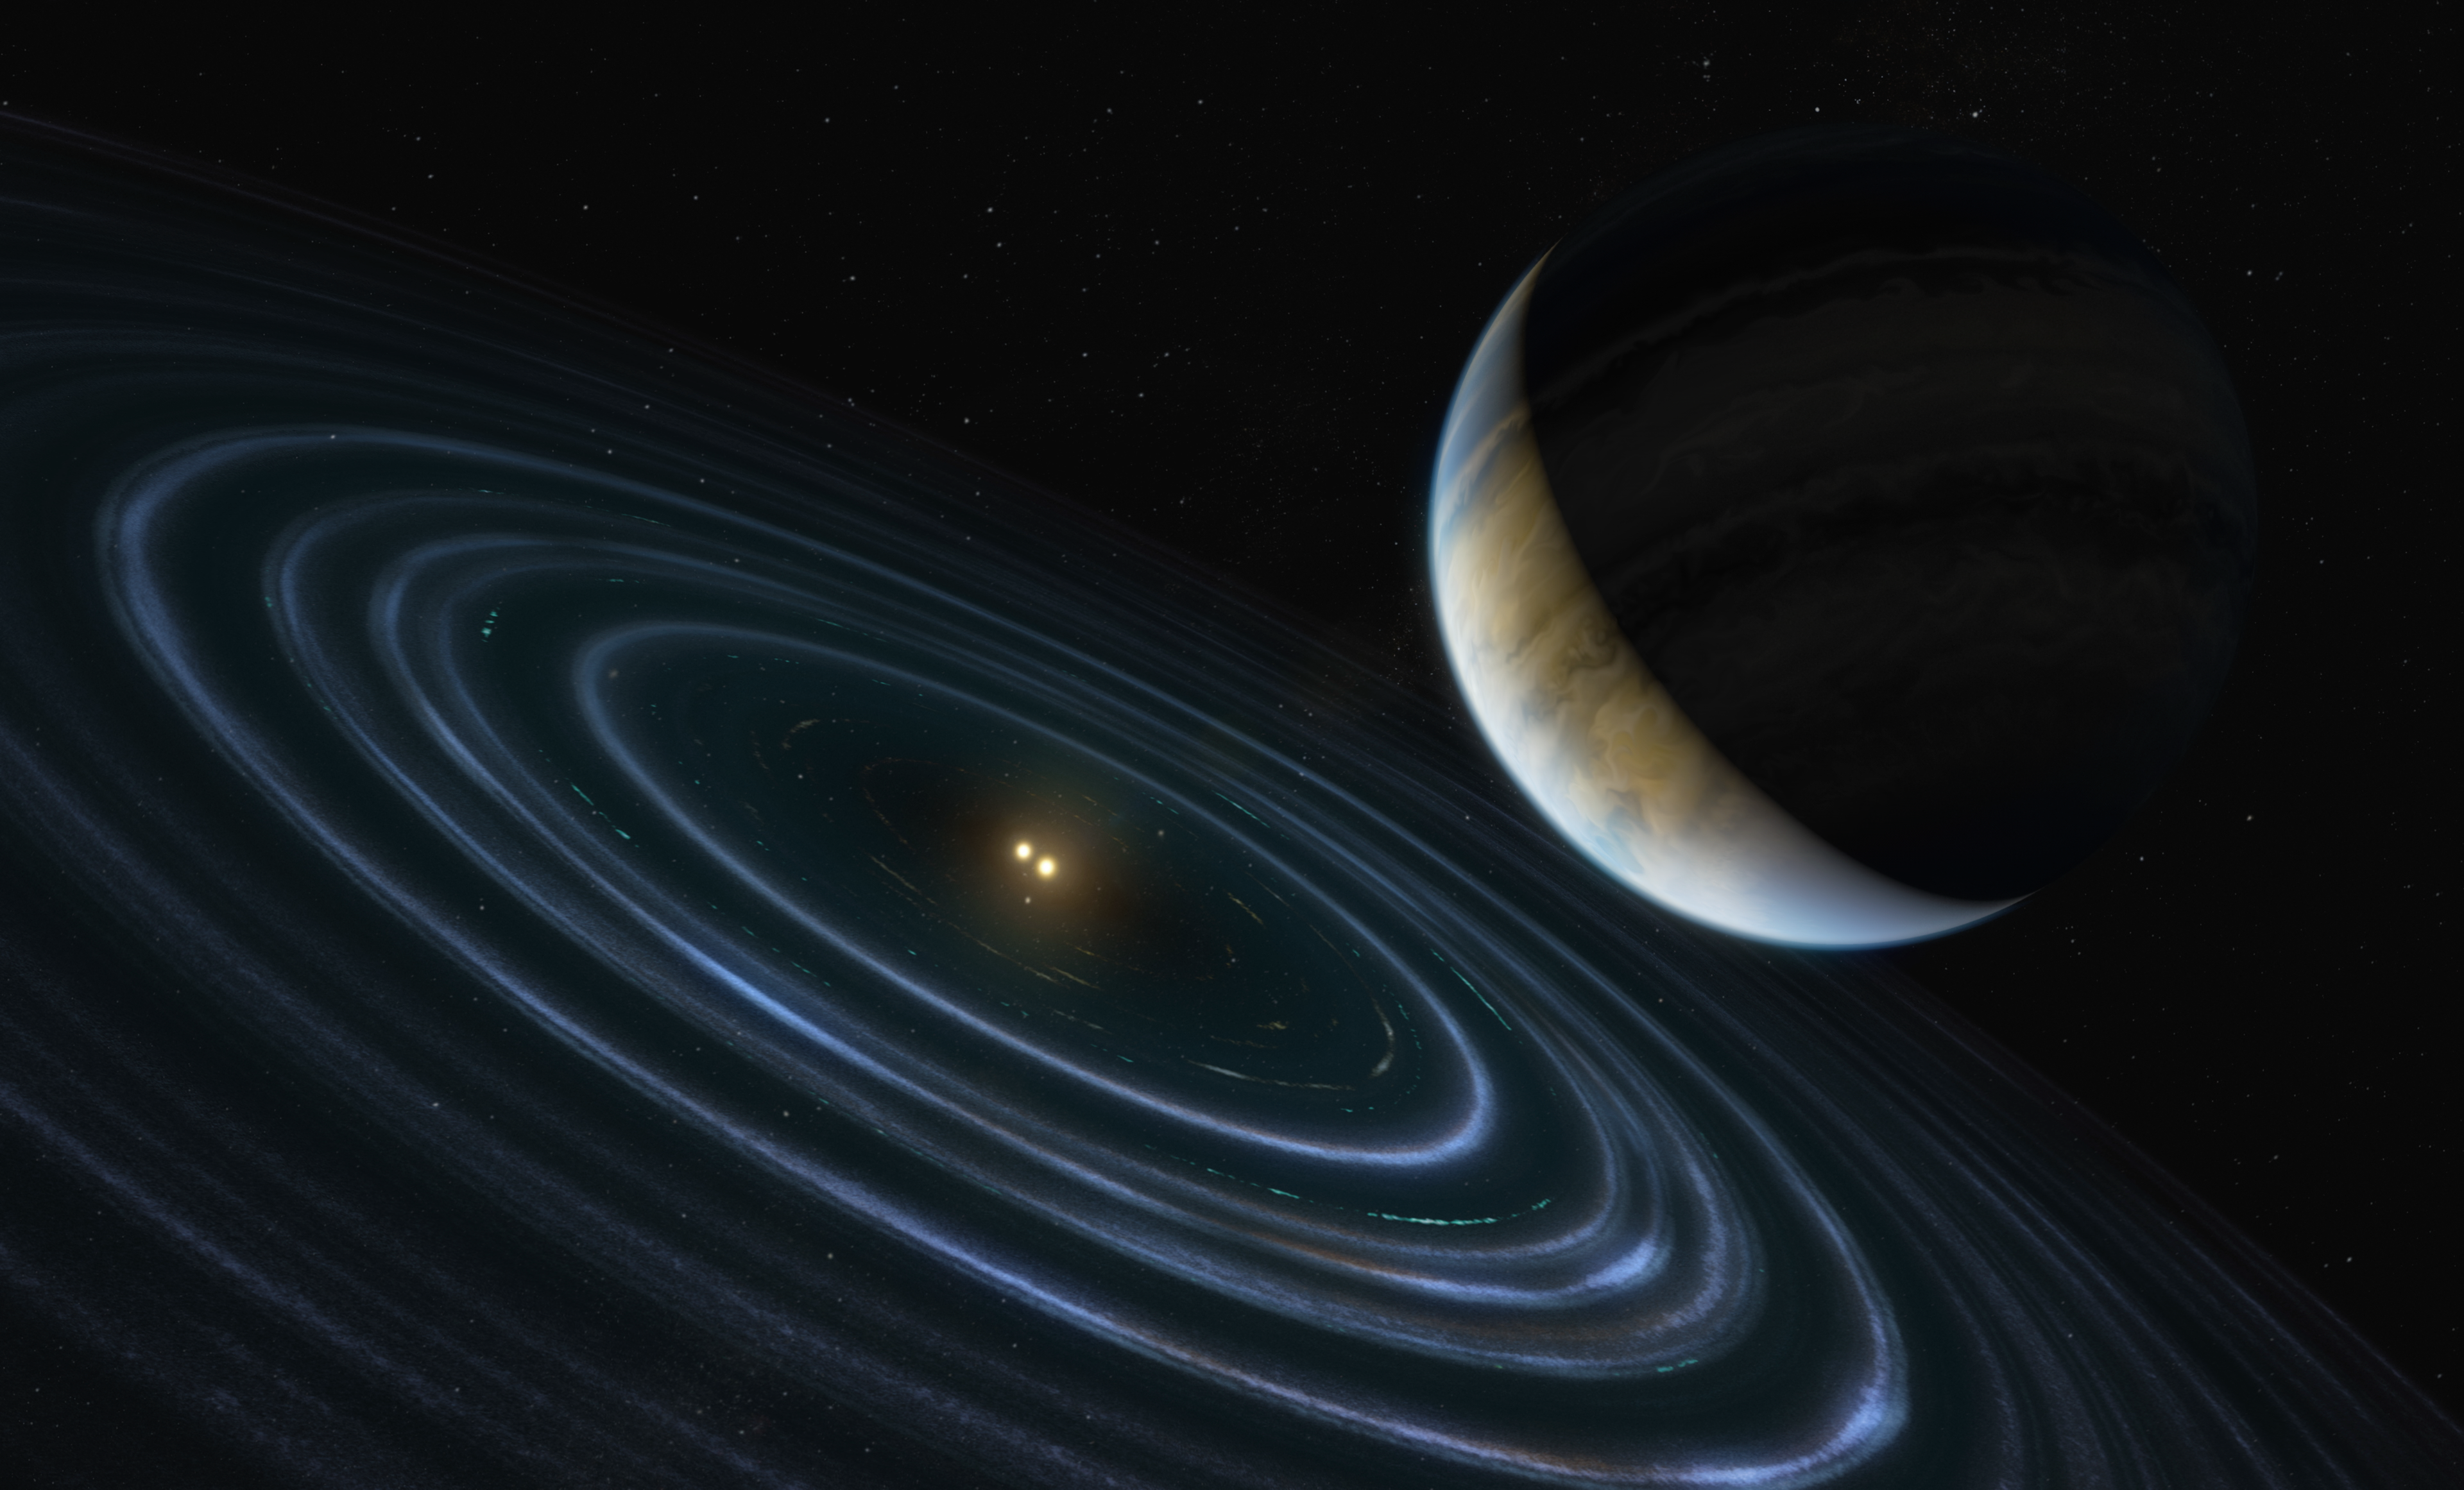

Artist’s Impression of Exoplanet HD 106906b

This 11-Jupiter-mass exoplanet called HD106906 b occupies an unlikely orbit around a double star 336 light-years away and it may be offering clues to something that might be much closer to home: a hypothesized distant member of our Solar System dubbed “Planet Nine.” This is the first time that astronomers have been able to measure the motion of a massive Jupiter-like planet that is orbiting very far away from its host stars and visible debris disc.

Credit: ESA/Hubble, M. Kornmesser